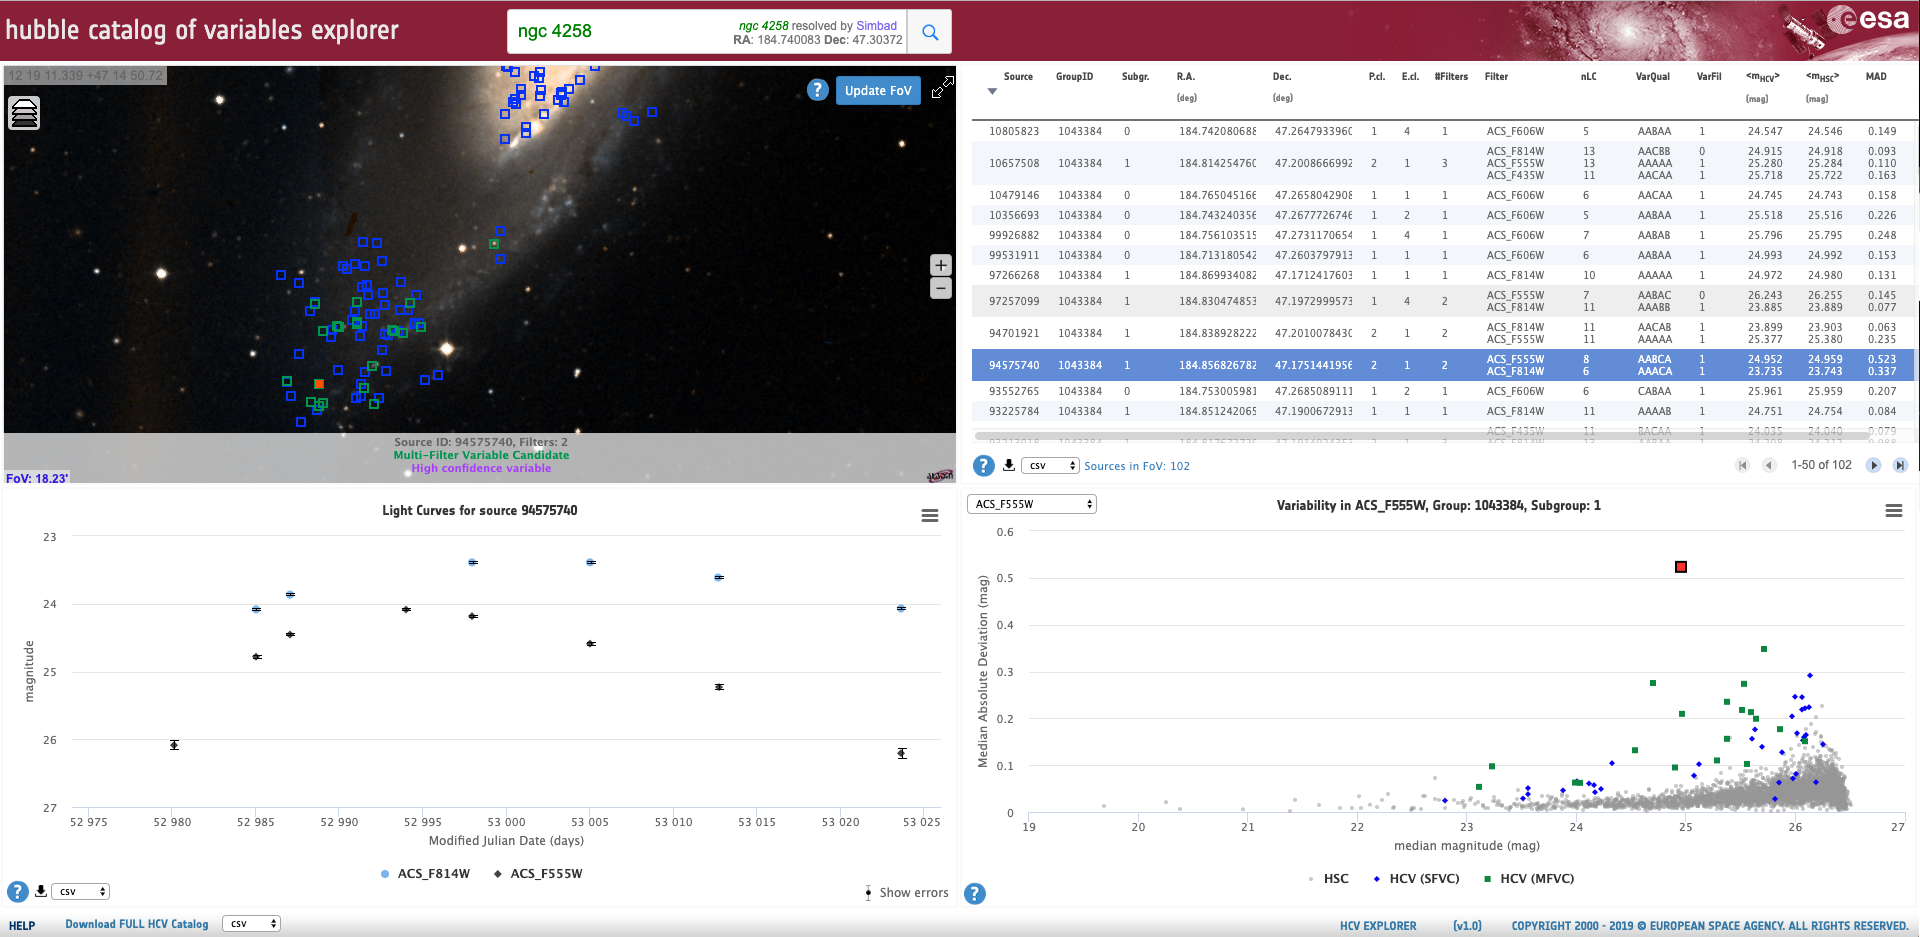

Screenshot of the HCV Explorer tool

Screenshot of the HCV Explorer tool.

Credit: ESA/Hubble